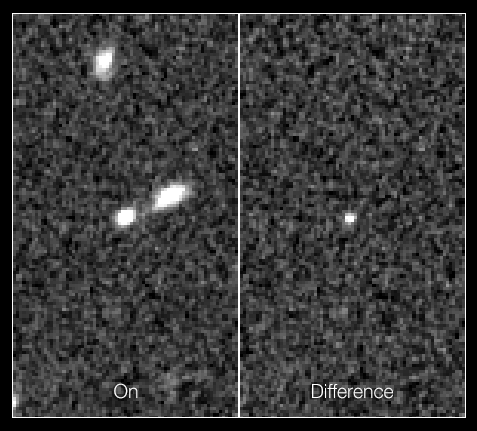

After view of the record-breaking supernova in the CANDELS Ultra Deep Survey

These two frames show the supernova dubbed SN UDS10Wil, or SN Wilson, the most distant Type Ia supernova ever detected.

The discovery was part of a three-year Hubble program begun in 2010, called the CANDELS+CLASH Supernova Project. This program aimed to survey faraway Type Ia supernovae to determine their distances and see if they have changed over the 13.8 billion years since the Big Bang, using the sharpness and versatility of Hubble's Wide Field Camera 3.

The left frame in this image shows the supernova’s host galaxy after the supernova had gone off, and the frame on the right indicates the brightness of the supernova alone (galaxy subtracted).

Credit: NASA, ESA, A. Riess (STScI and JHU), and D. Jones and S. Rodney (JHU)